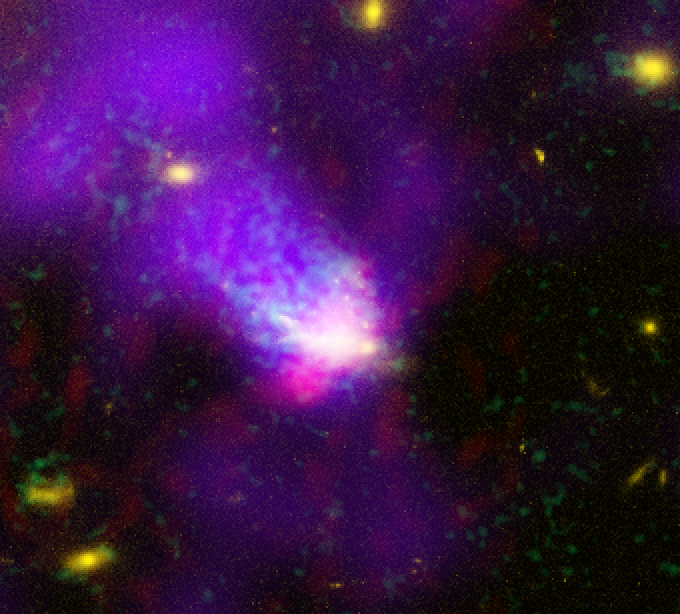

Galaxy C153 in Cluster Abell 2125 (Composite)

Trailing 200,000-light-year-long streamers of seething gas, a galaxy that was once like our Milky Way is being shredded as it plunges at 4.5 million miles per hour through the heart of a distant cluster of galaxies. In this unusually violent collision with ambient cluster gas, the galaxy is stripped down to its skeletal spiral arms as it is eviscerated of fresh hydrogen for making new stars.

Credit: NASA/ESA, W. Keel (U Alabama), F. Owen (NRAO), M. Ledlow (Gemini Obs.), and D. Wang (U Mass.)